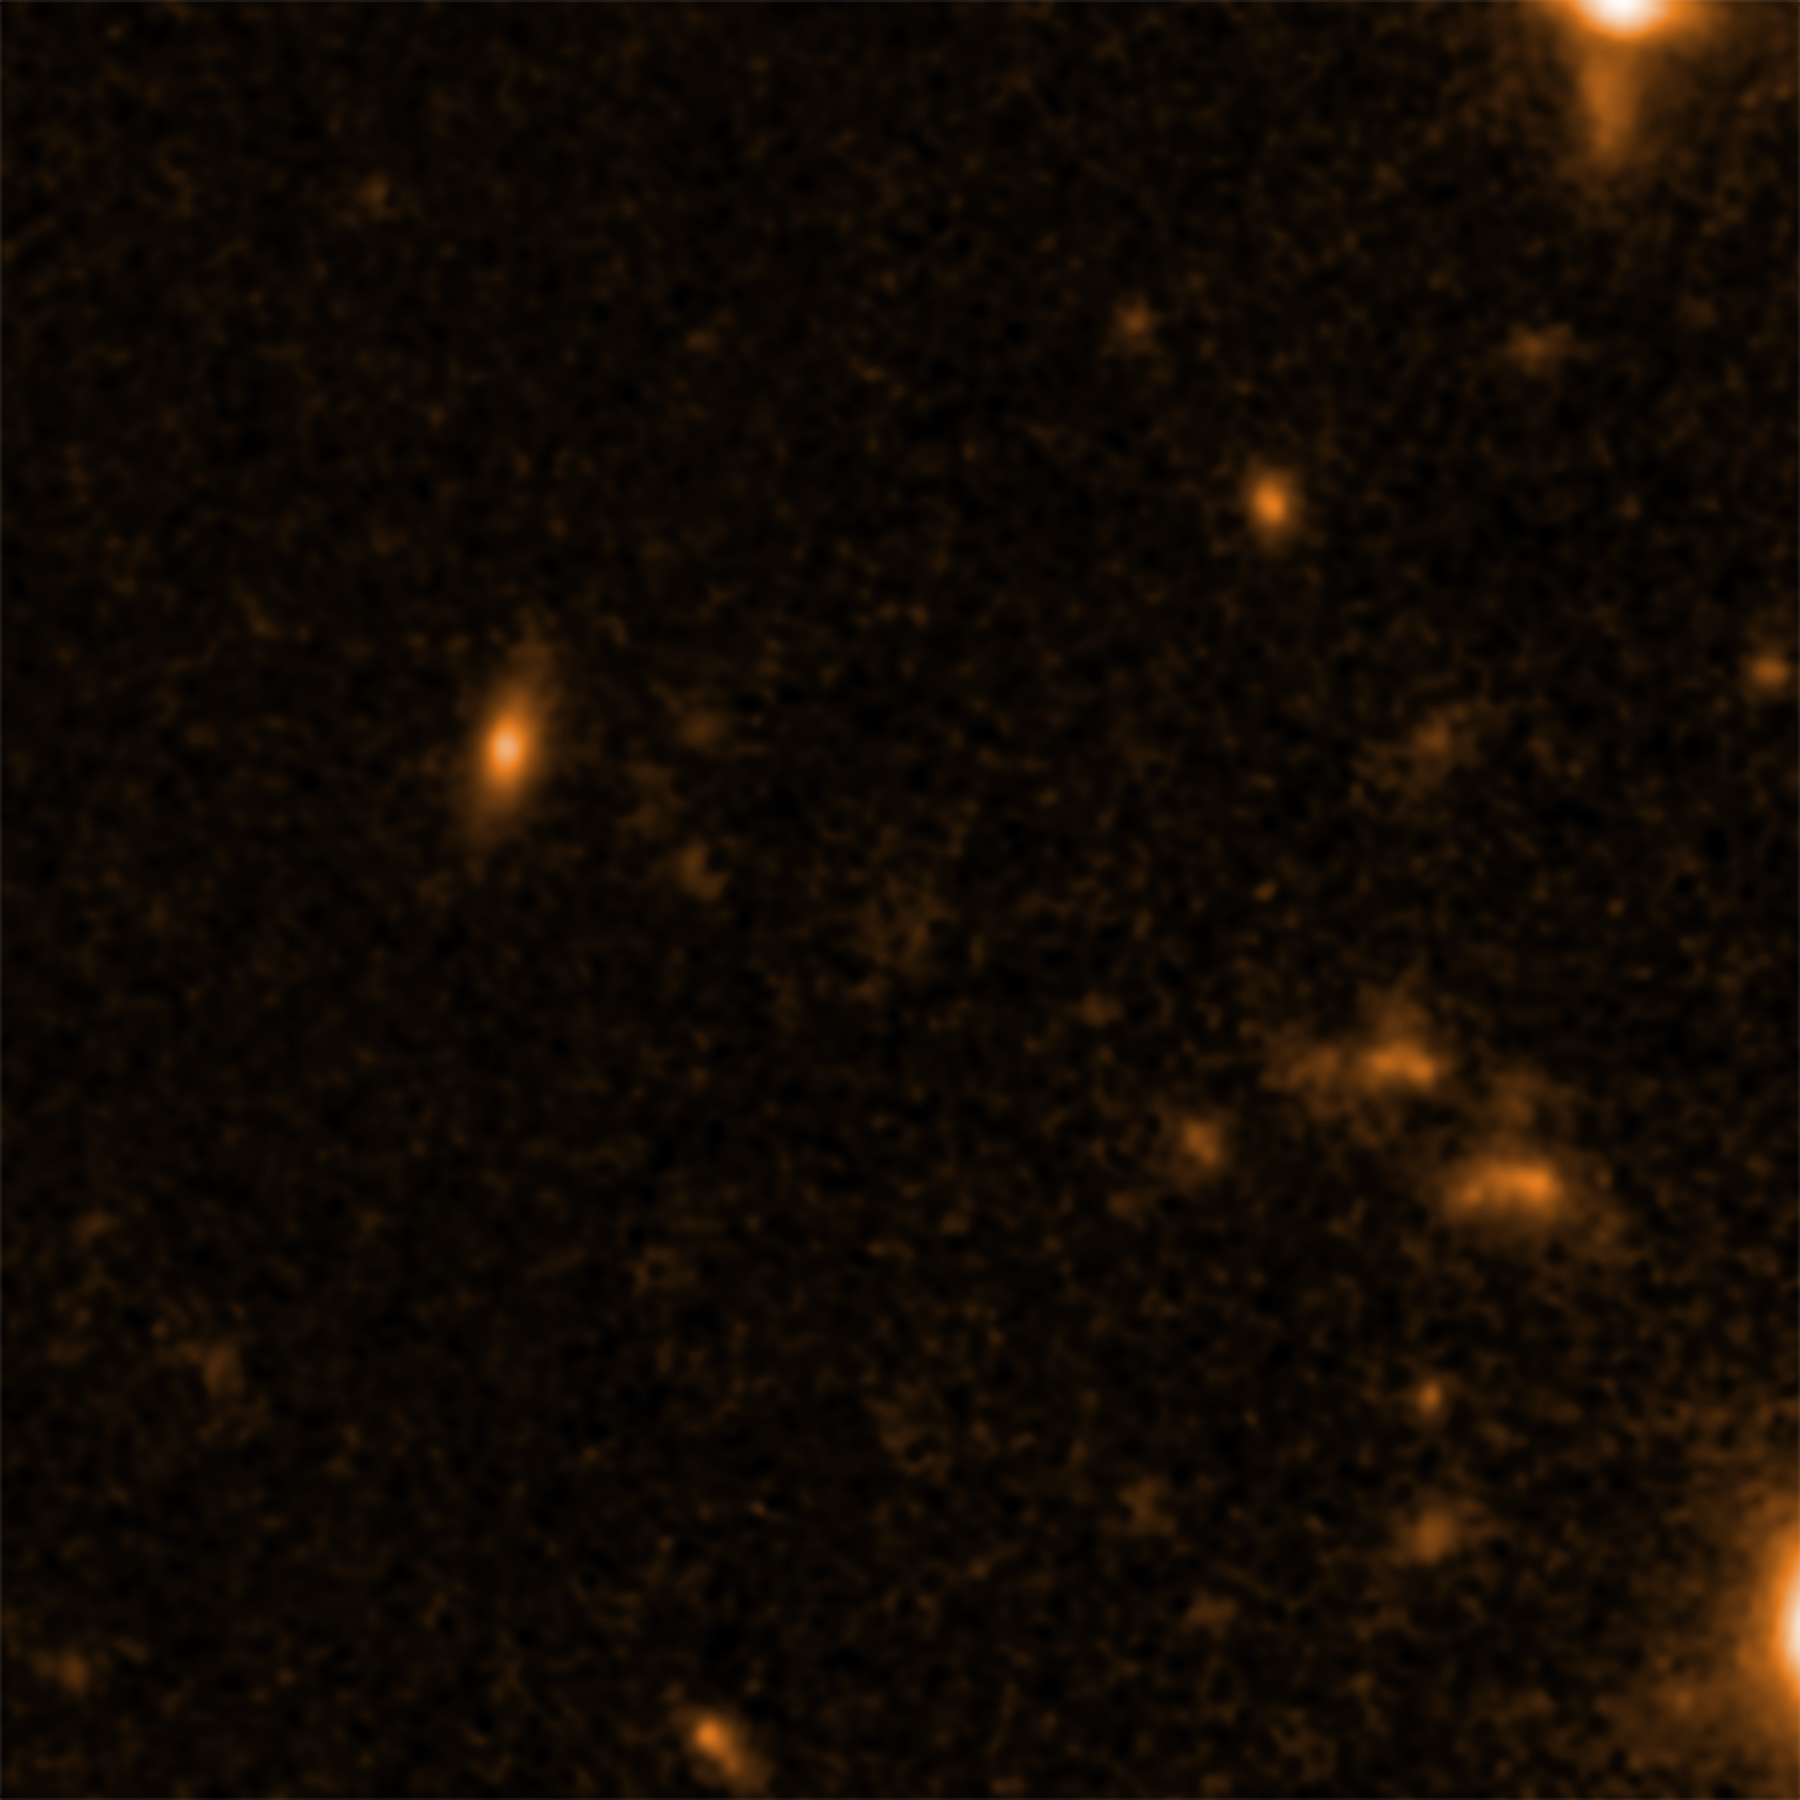

Supermassive black hole seed seen by Hubble

This image shows one of two detected supermassive black hole seeds, OBJ29323, as it is seen by the NASA/ESA Hubble Space Telescope.

Credit: NASA/STScI/ESA